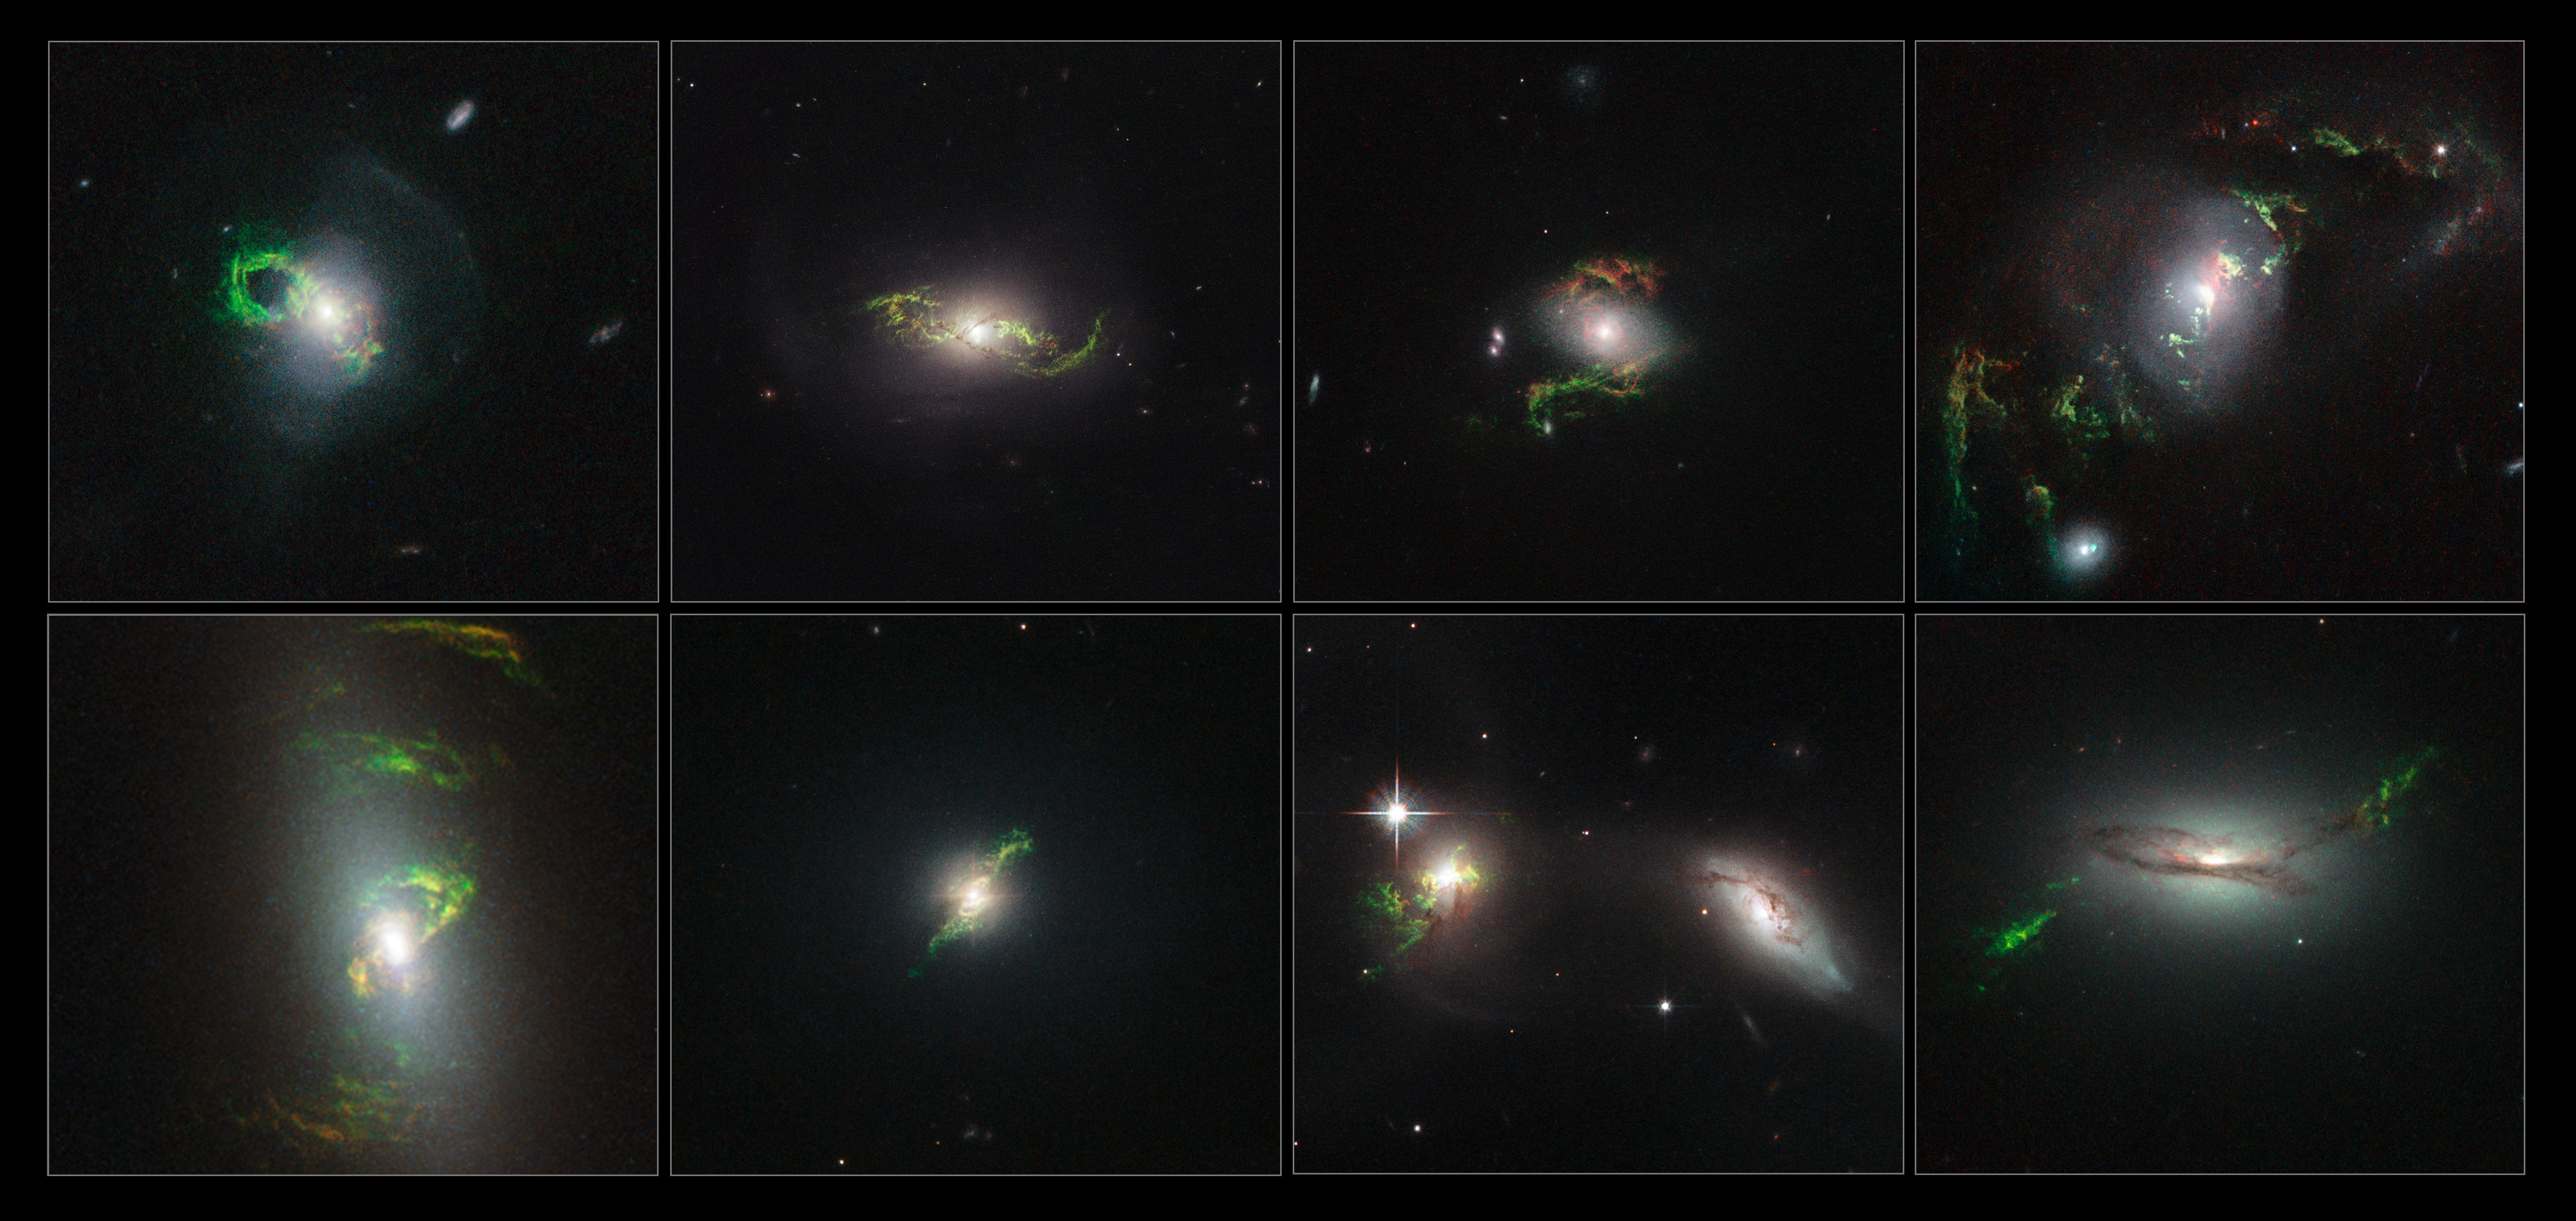

Hubble spies eight green filaments lit up by past quasar blasts

This image shows the winding green filaments observed by the NASA/ESA Hubble Space Telescope within eight different galaxies. The ethereal wisps in these images were illuminated, perhaps briefly, by a blast of radiation from a quasar — a very luminous and compact region that surrounds a supermassive black hole at the centre of a galaxy.

In each of these eight images a quasar beam has caused once-invisible filaments in deep space to glow through a process called photoionisation. Oxygen, helium, nitrogen, sulphur and neon in the filaments absorb light from the quasar and slowly re-emit it over many thousands of years. Their unmistakable emerald hue is caused by ionised oxygen, which glows green.

The Hubble team found a total of twenty galaxies that had gas ionised by quasars; those featured here are (from left to right on top row) the Teacup (more formally known as 2MASX J14302986+1339117), NGC 5972, 2MASX J15100402+0740370 and UGC 7342, and (from left to right on bottom row) NGC 5252, Mrk 1498, UGC 11185 and 2MASX J22014163+1151237.

Credit: NASA, ESA, Galaxy Zoo Team and W. Keel (University of Alabama, USA)